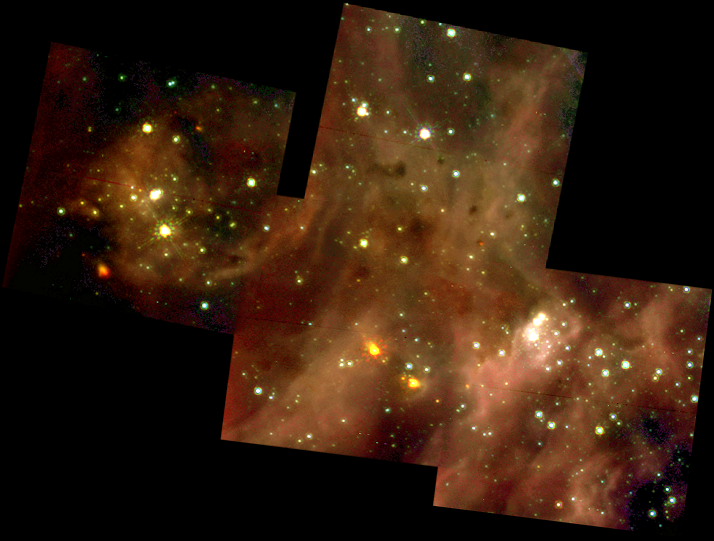

A Grand View of the Birth of 'Hefty' Stars - 30 Doradus Nebula Montage

This picture, taken in visible light with the Hubble Space Telescope's Wide Field and Planetary Camera 2(WFPC2), represents a sweeping view of the 30 Doradus Nebula. But Hubble's infrared camera - the Near Infrared Camera and Multi-Object Spectrometer (NICMOS) - has probed deeper into smaller regions of this nebula to unveil the stormy birth of massive stars. The montages of images in the upper left and upper right represent this deeper view. Each square in the montages is 15.5 light-years (19 arcseconds) across.

Credit: NASA/ESA/Nolan Walborn ( Space Telescope Science Institute, Baltimore, Md.) and Rodolfo Barba (La Plata Observatory, La Plata, Argentina)